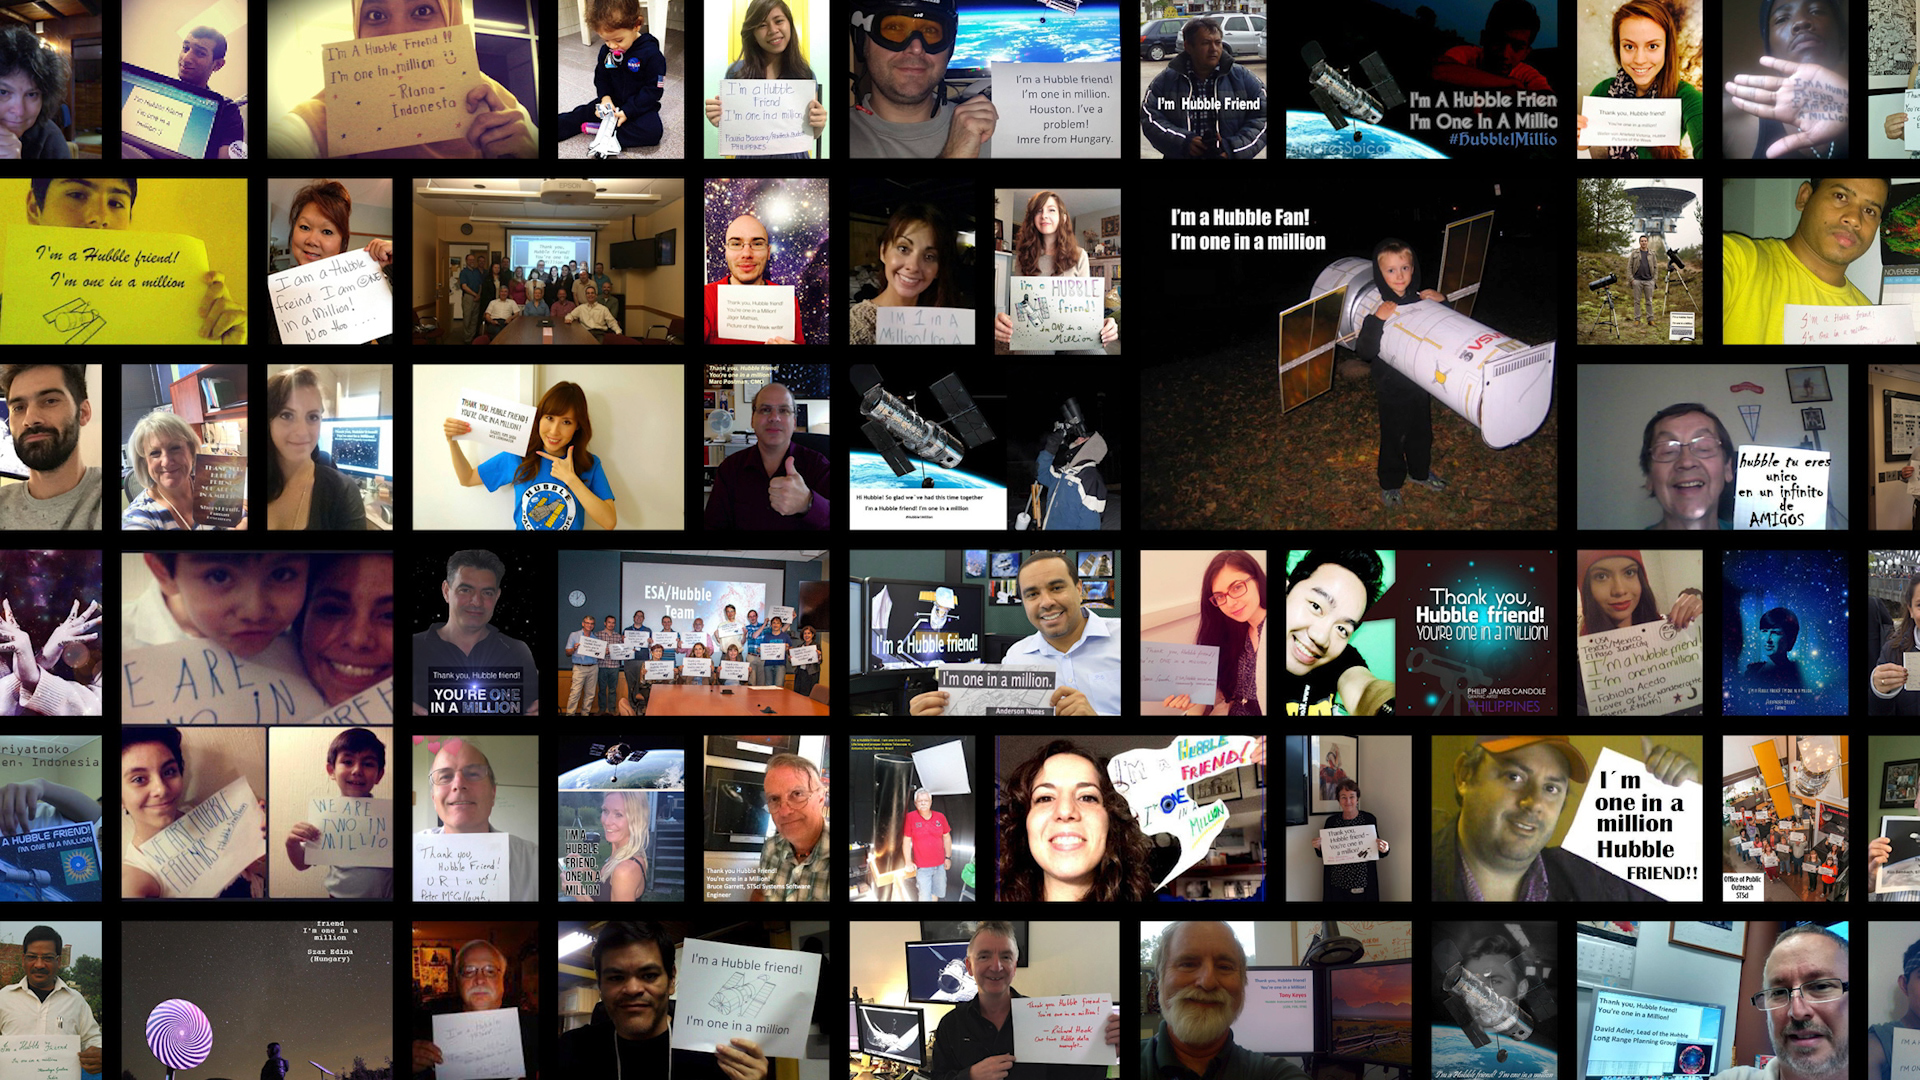

Still from Hubblecast 94: the future of Hubble, part II

This is a still from Hubblecast 94, in which scientists and the director of the Space Telescope Science Institute talk about the future of the Hubble Space Telescope.

Credit: NASA & ESA